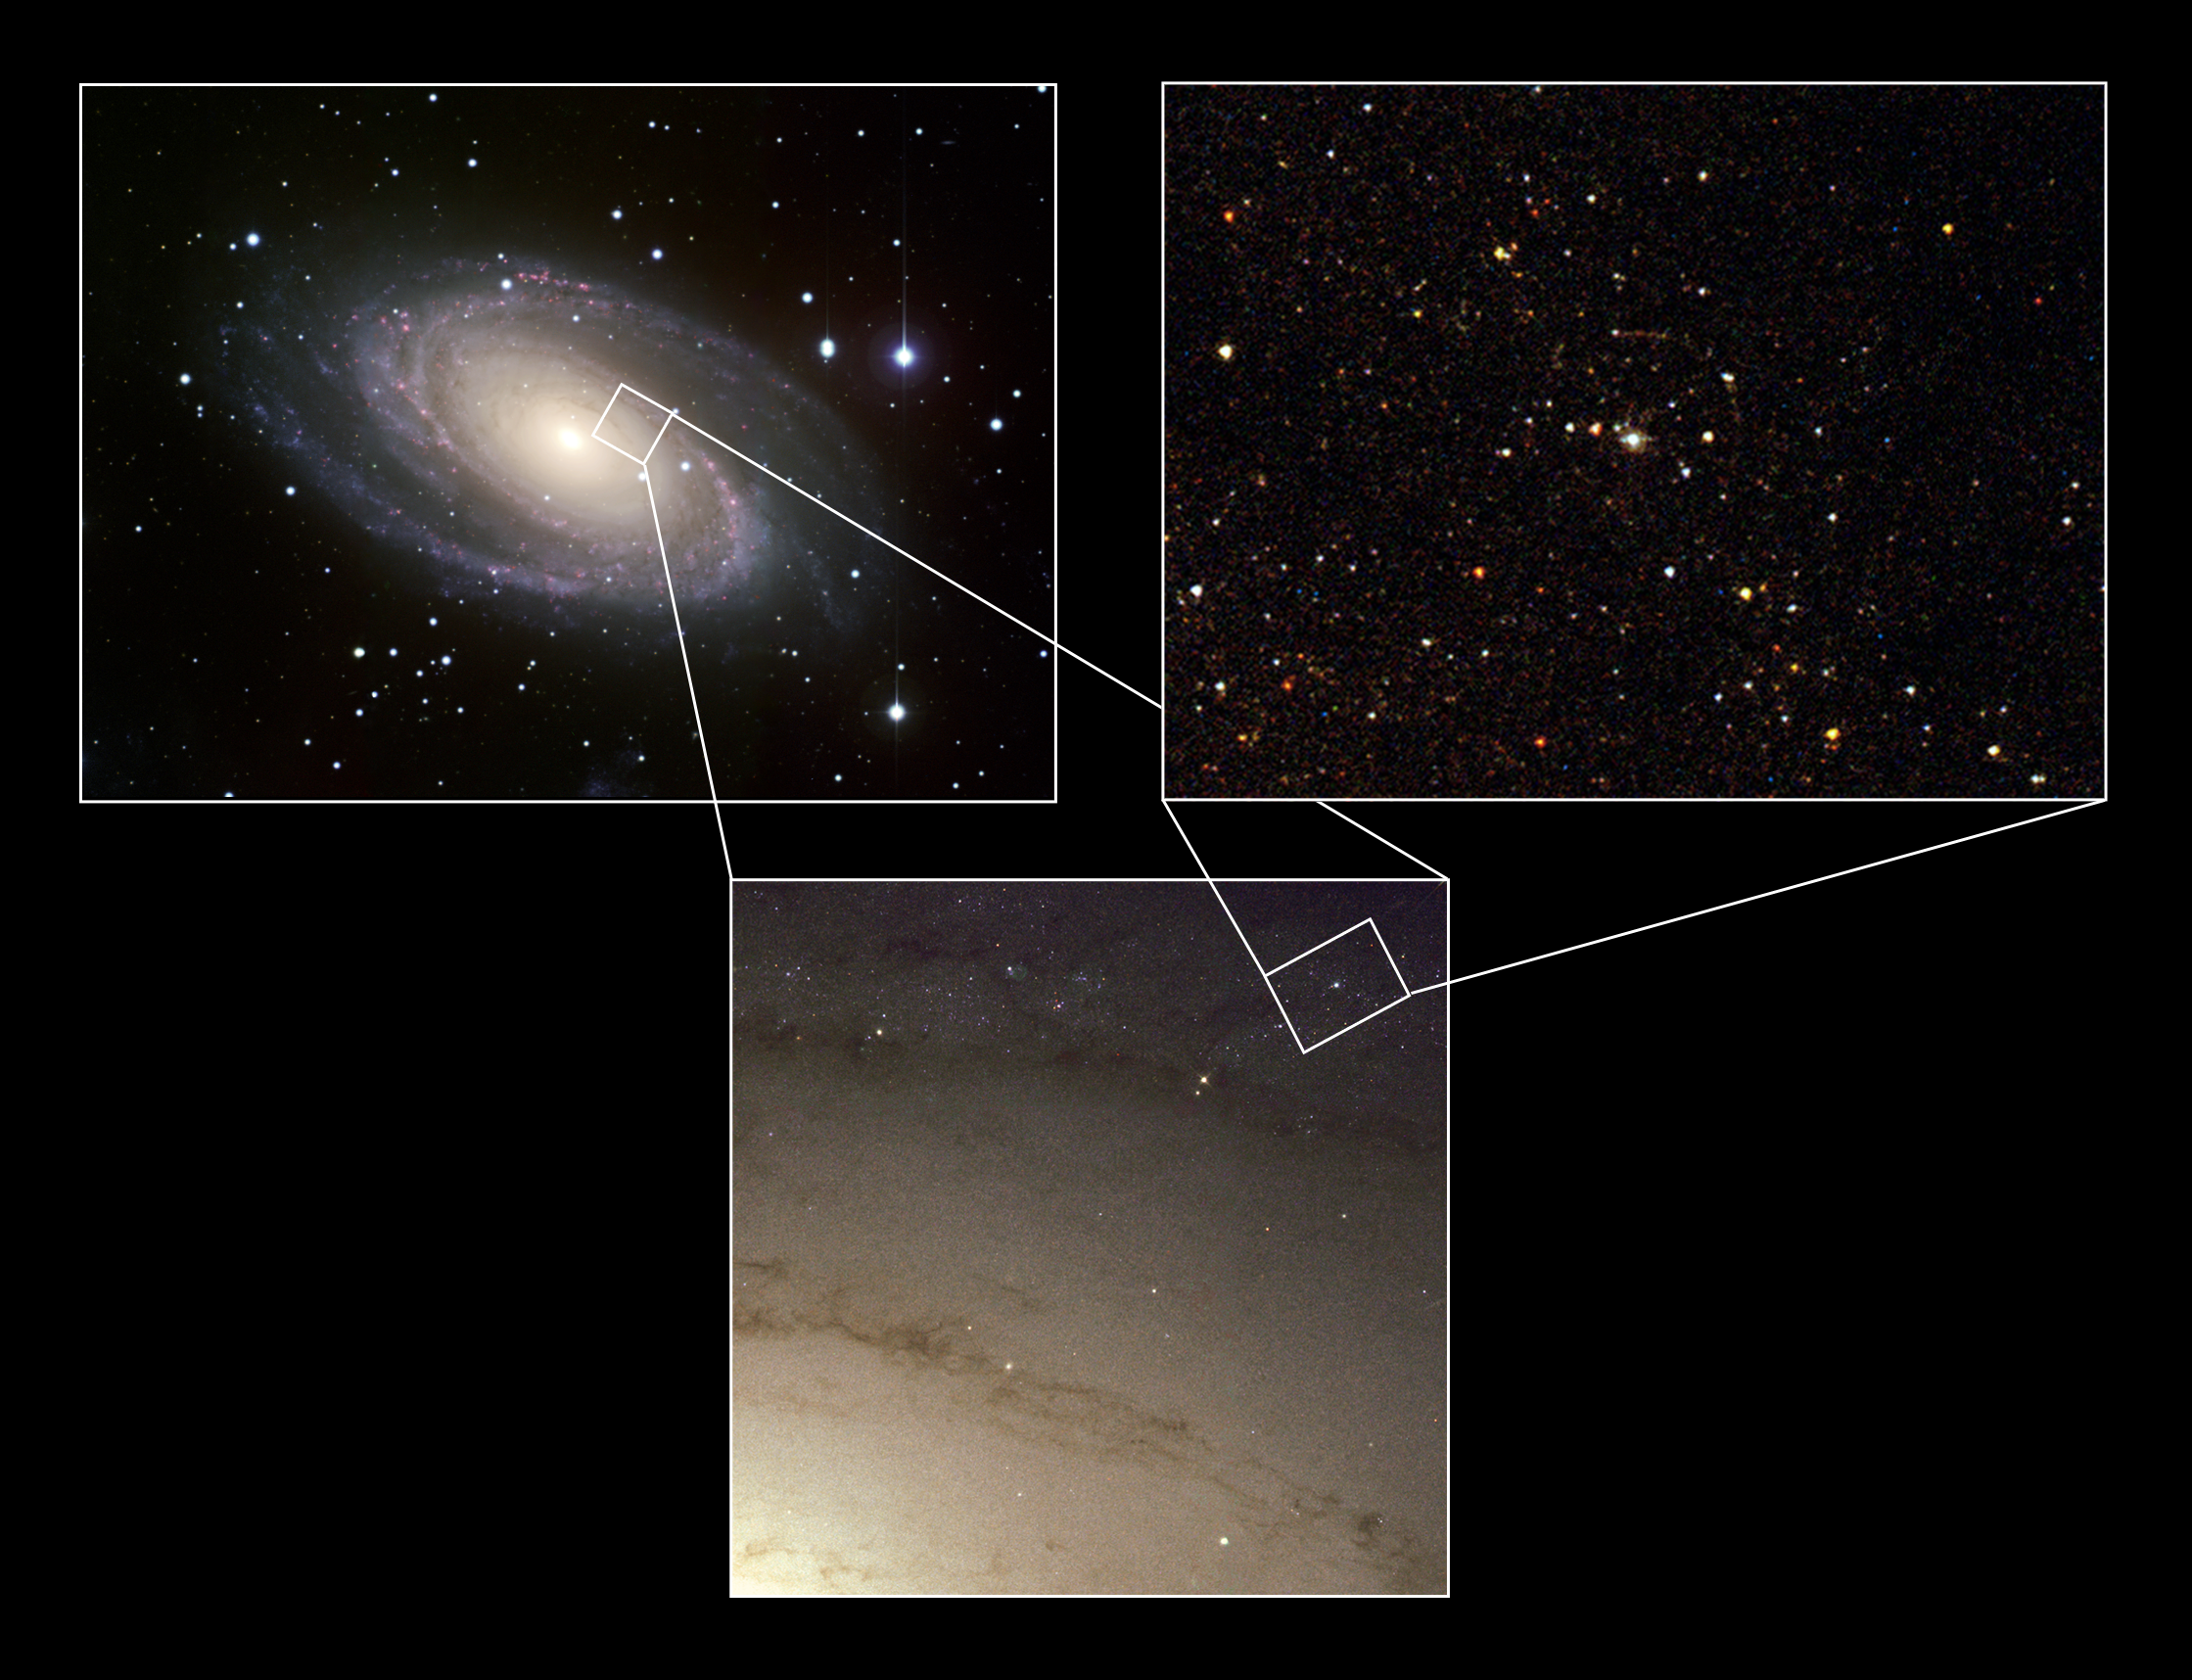

The site of the Supernova 1993J explosion (composite)

A virtual journey into one of the spiral arms of the grand spiral Messier 81 (imaged with the Isaac Newton Telescope on La Palma, left) reveals the superb razor-sharp imaging power of the NASA/ESA Hubble Space Telescope (Hubble's WFPC2 instrument, below). The close-up (with Hubble's ACS, to the right) is centred on the newly discovered companion star to Supernova 1993J that itself is no longer visible. The quarter-circle around the supernova companion is a so-called light echo originating from sheets of dust in the galaxy reflecting light from the original supernova explosion.

Credit: ESA and Justyn R. Maund (University of Cambridge)